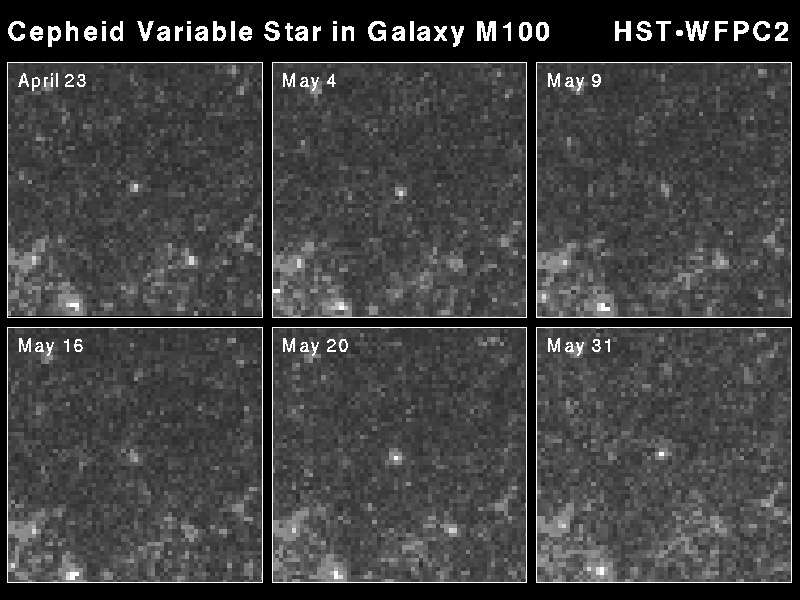

Cepheid variable star in galaxy M100

This sequence of images taken with the Hubble Space Telescope chronicles the rhythmic changes in a rare class of variable star (located in the center of each image) in the spiral galaxy M100. This class of pulsating star is called a Cepheid Variable. The Cepheid in this Hubble picture doubles in brightness (24.5 to 25.3 apparent magnitude) over a period of 51.3 days.

Credit: Dr. Wendy L. Freedman, Observatories of the Carnegie Institution of Washington, and NASA/ESA